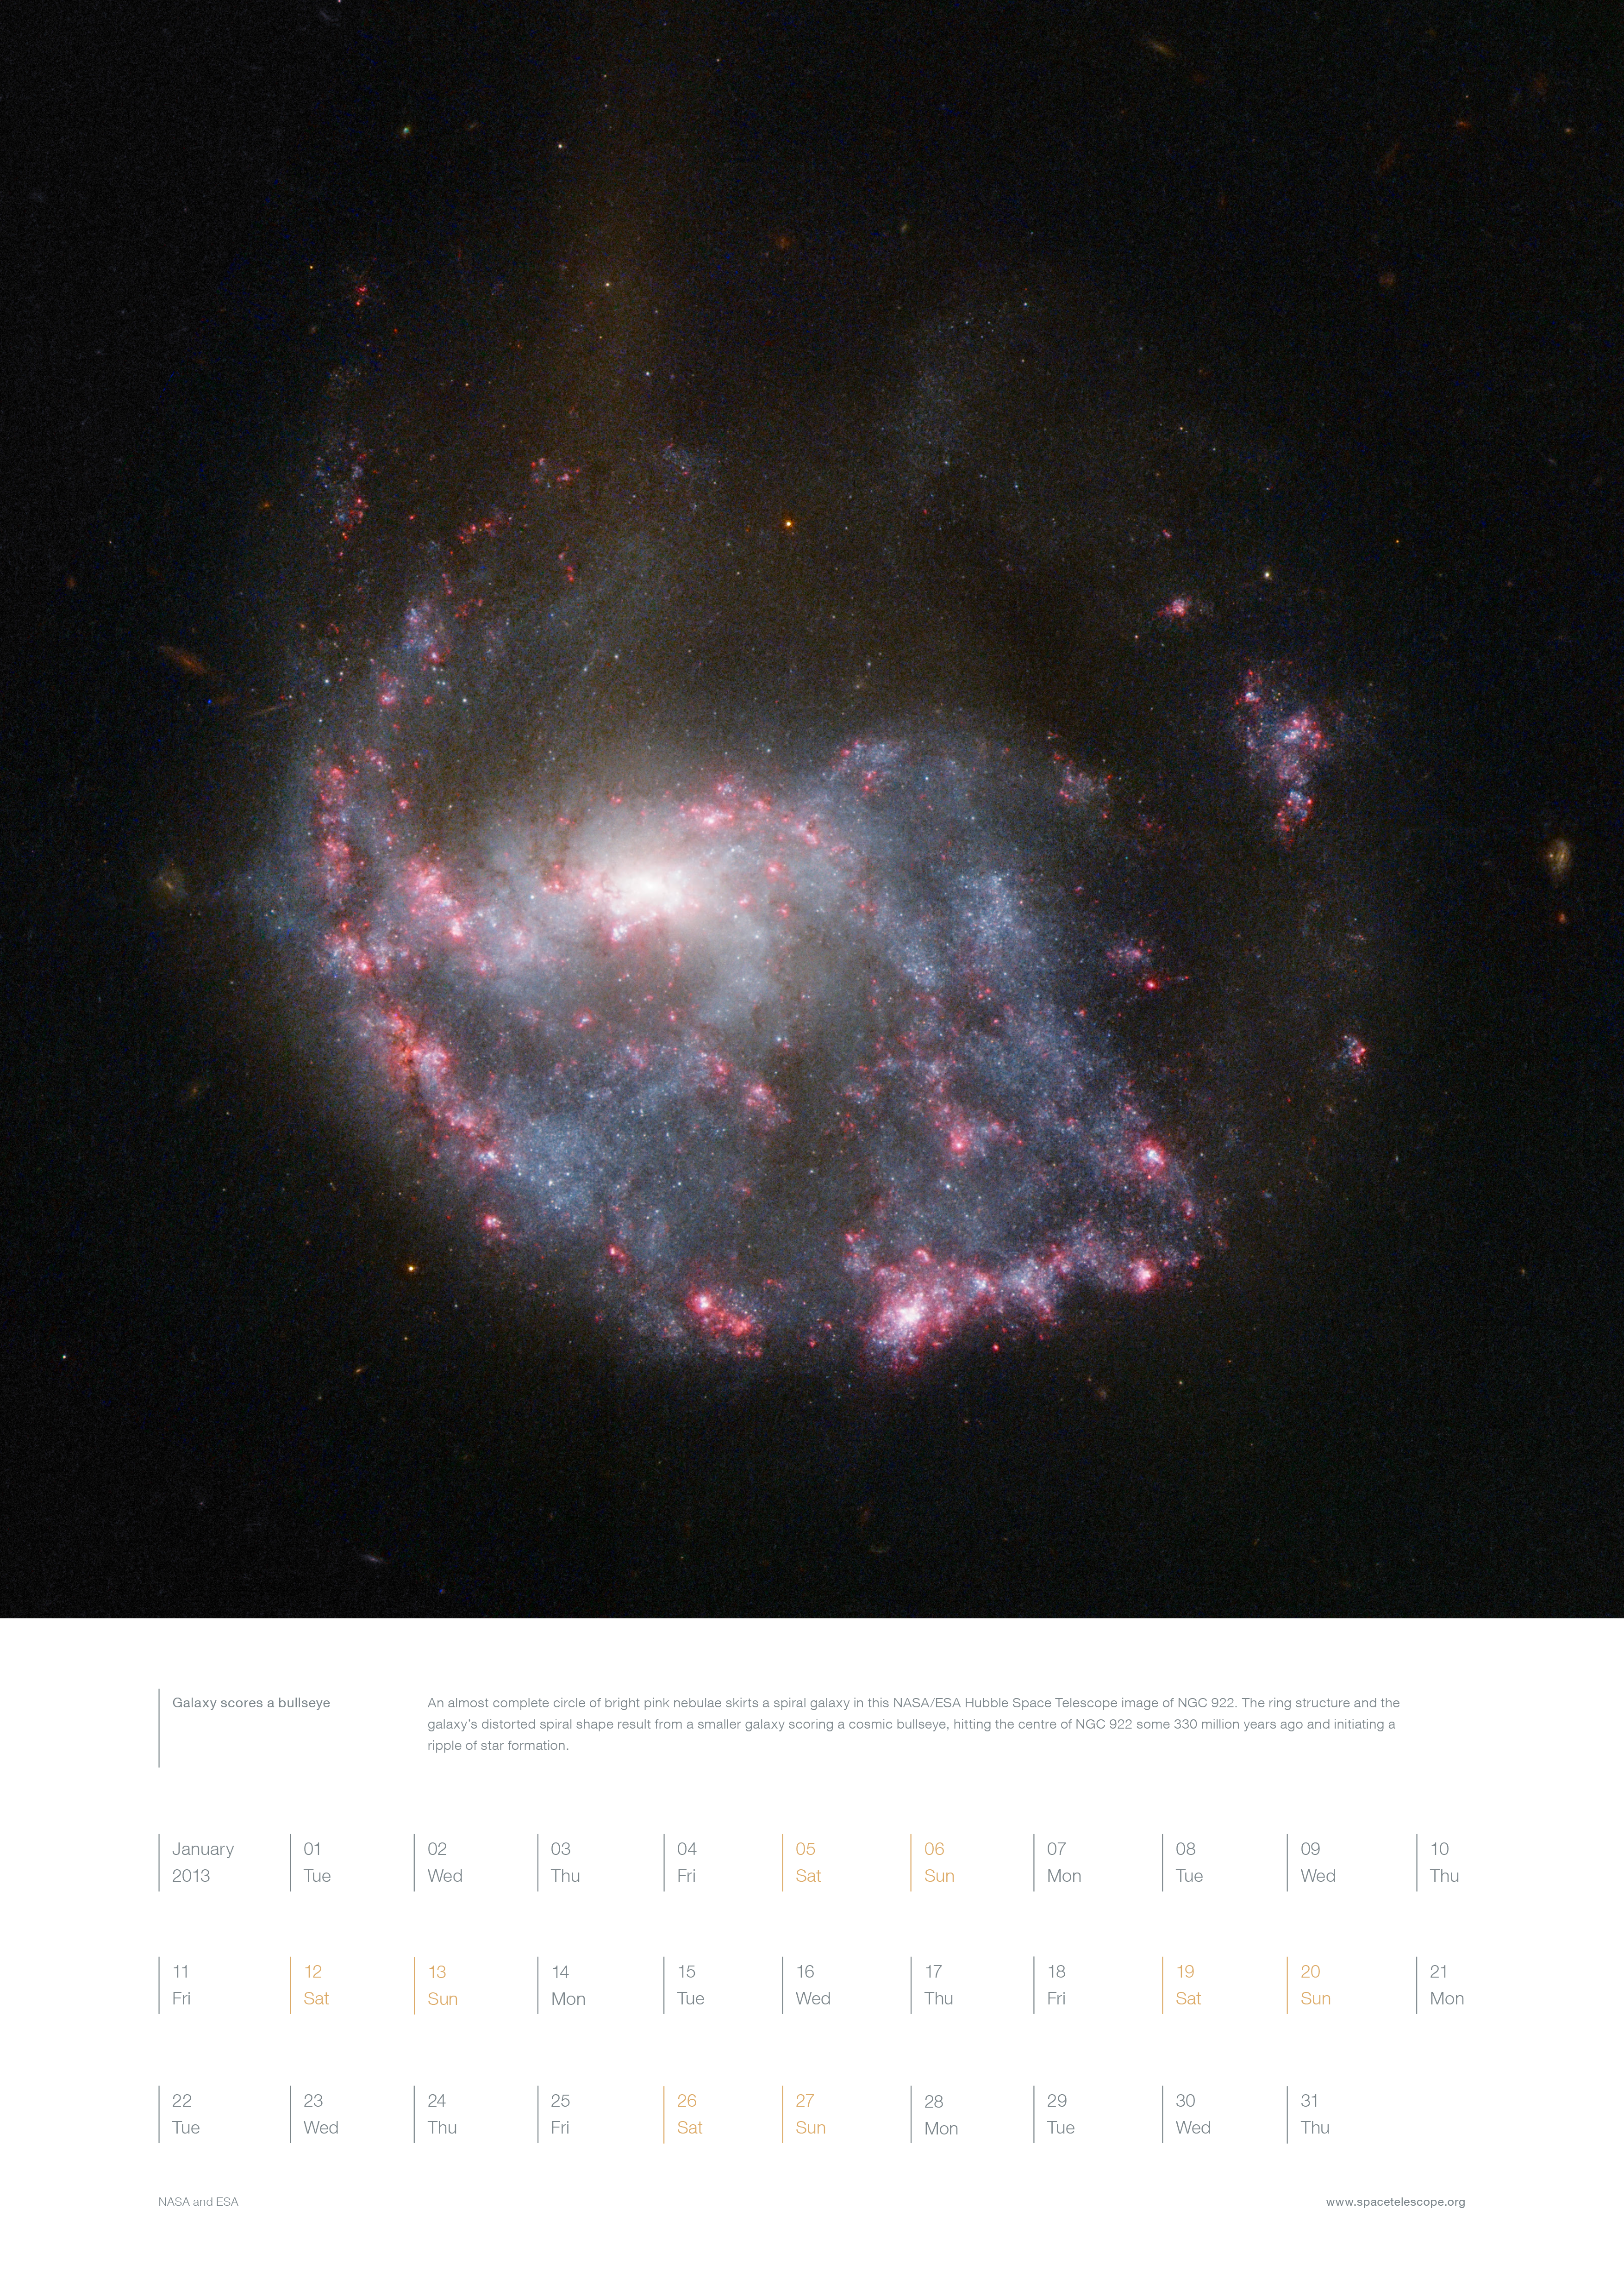

January from the Hubble 2013 calendar

This image shows the page for January from the Hubble Space Telescope 2013 calendar.

Credit: ESA/Hubble